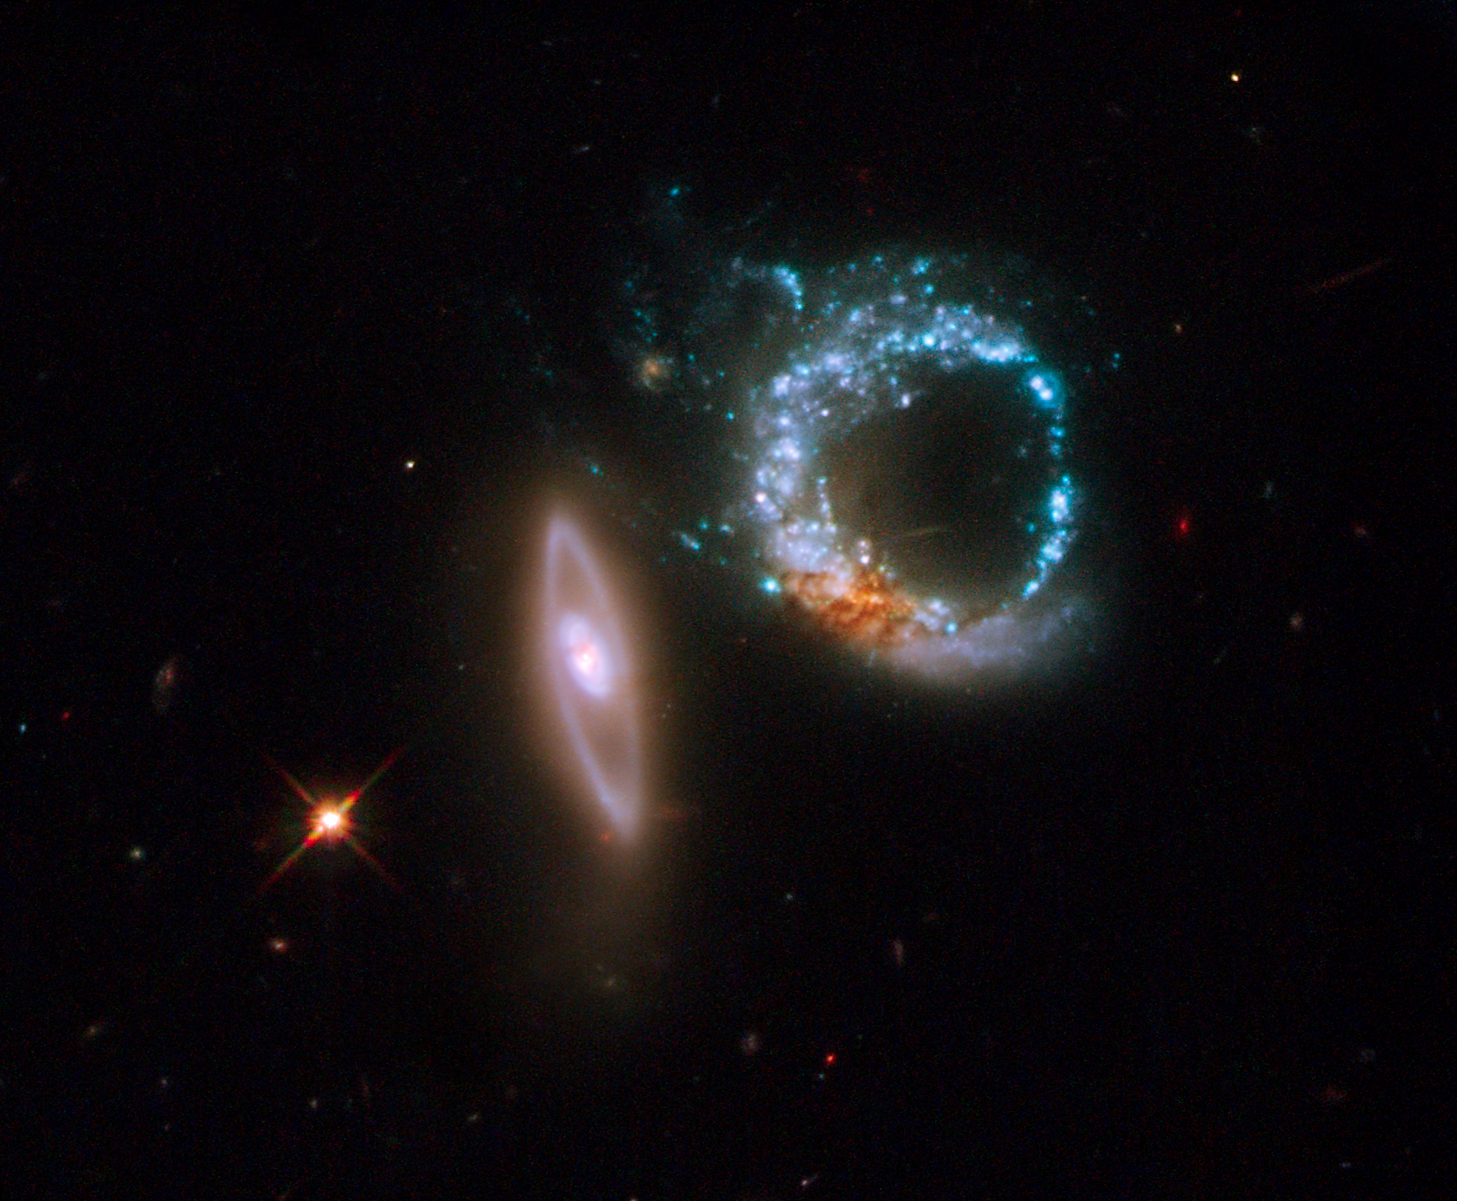

Hubble scores a perfect ten

The NASA/ESA Hubble Space Telescope is back in business. Just a couple of days after the orbiting observatory was brought back online, Hubble aimed its prime working camera, the Wide Field Planetary Camera 2 (WFPC2), at a particularly intriguing target, a pair of gravitationally interacting galaxies called Arp 147.

The two galaxies happen to be oriented so that they appear to mark the number 10. The left-most galaxy, or the "one" in this image, is relatively undisturbed, apart from a smooth ring of starlight. It appears nearly edge-on to our line of sight. The right-most galaxy, the "zero" of the pair, exhibits a clumpy, blue ring of intense star formation.

Credit: NASA, ESA and M. Livio (STScI)